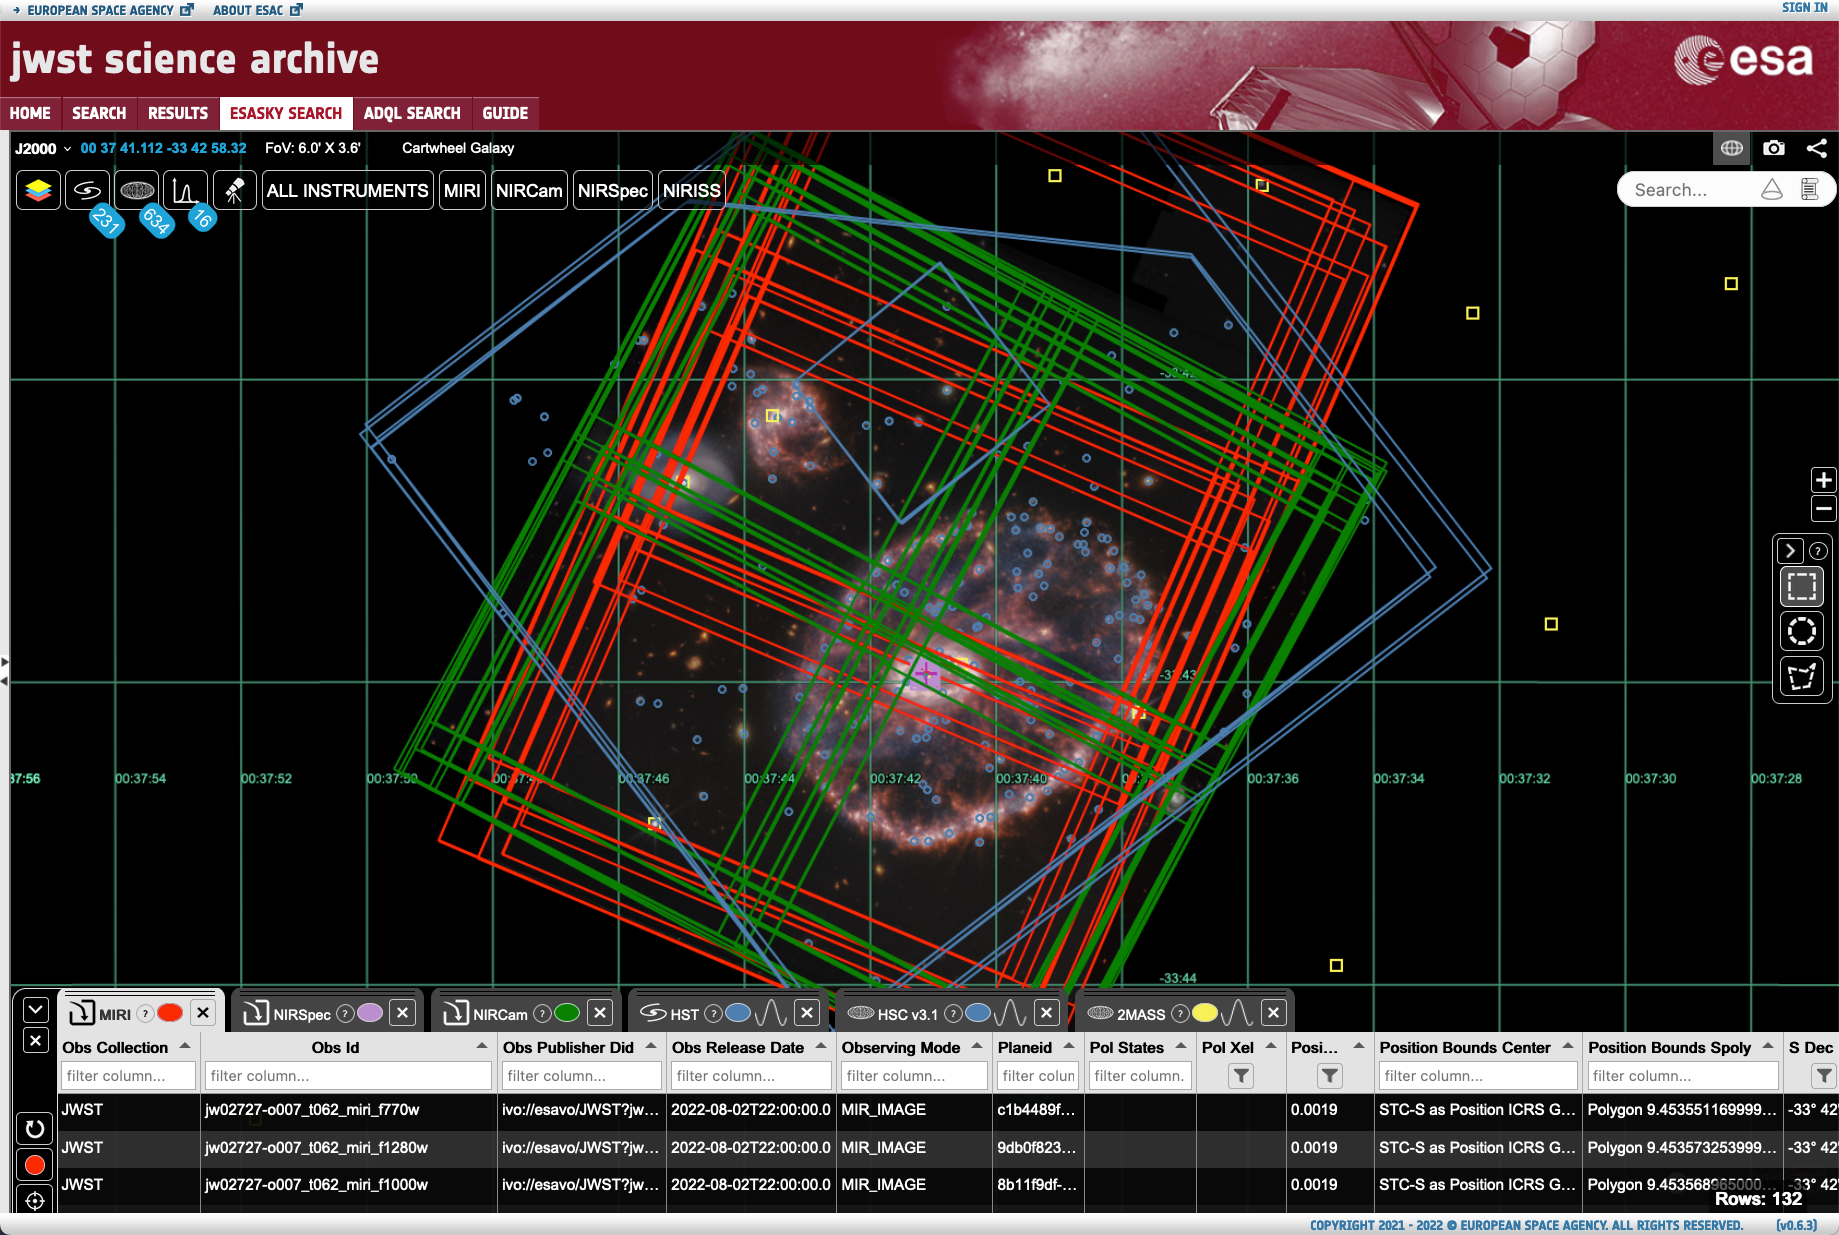

Example screenshot from eJWST and ESASky for the Cartwheel Galaxy

Example screenshot from eJWST and ESASky of the various JWST and HST instrument footprints for the observations of the Cartwheel Galaxy.

Credit: ESA/Webb